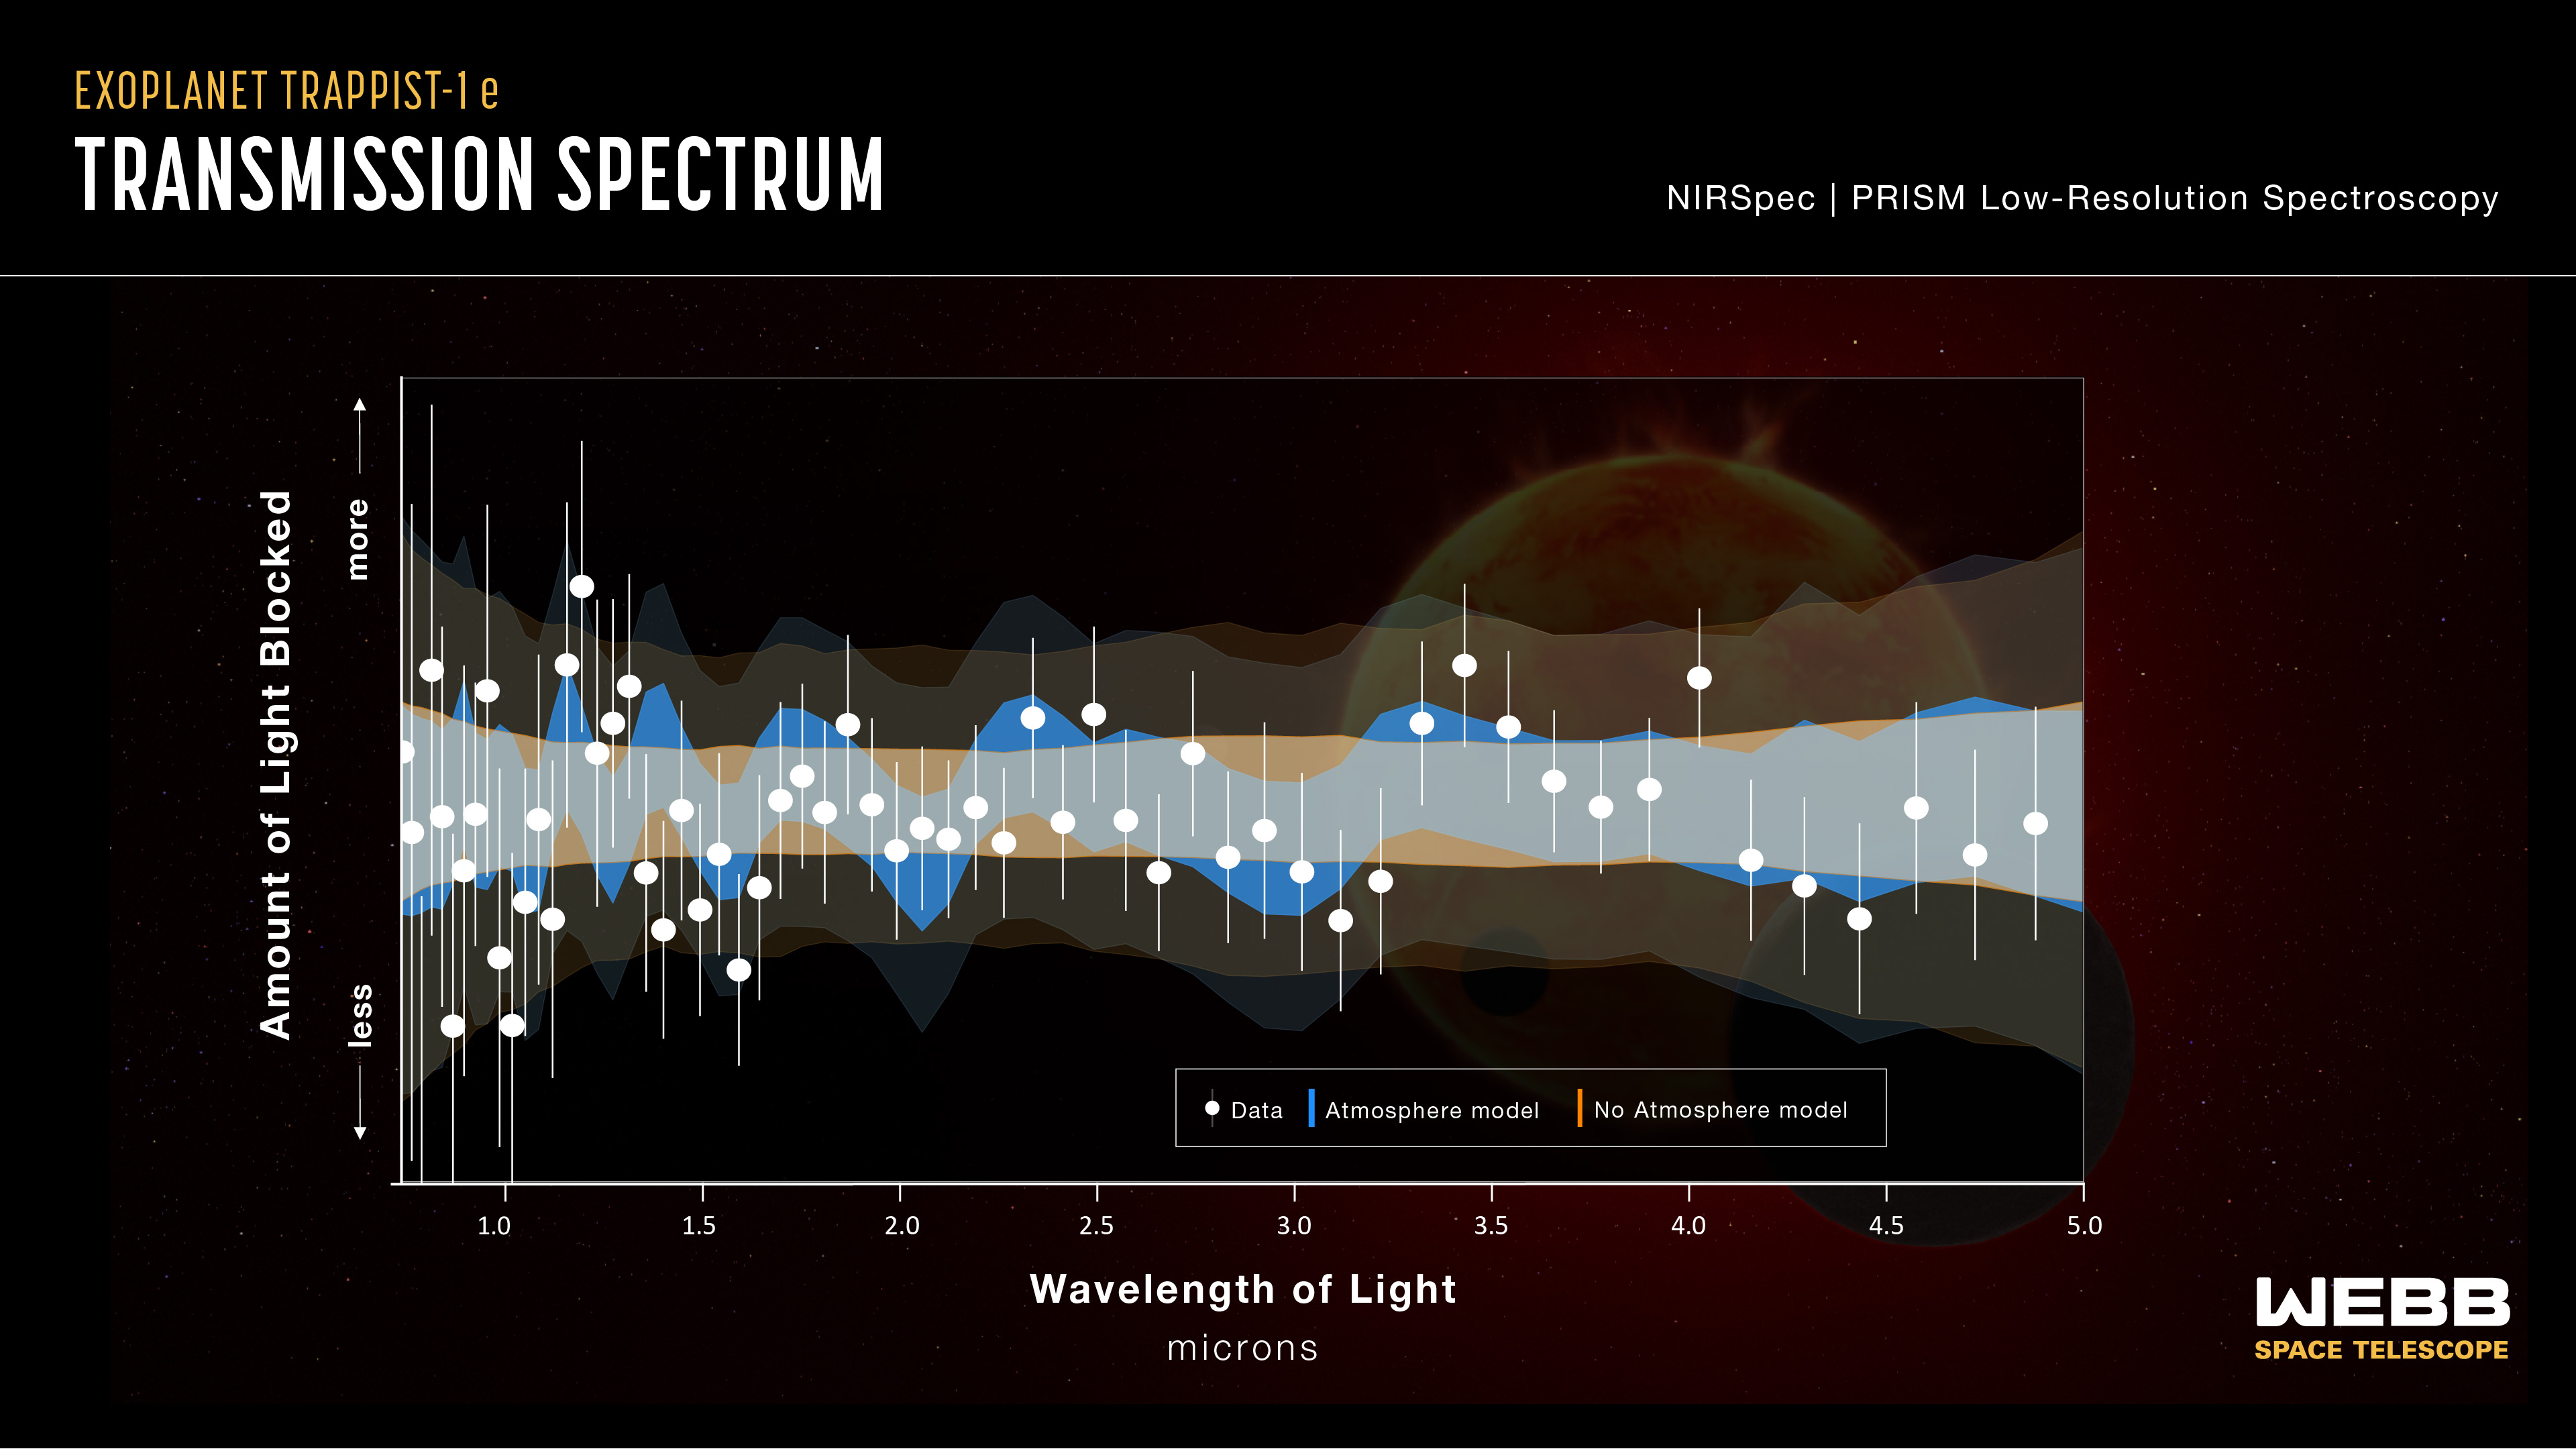

TRAPPIST-1 e Transmission Spectrum (NIRSpec)

This transmission spectrum graph compares data collected by the NIRSpec (Near-Infrared Spectrograph) instrument on the NASA/ESA/CSA James Webb Space Telescope with computer models of exoplanet TRAPPIST-1 e with (blue) and without (orange) an atmosphere. Narrower, darker colored bands show the most likely locations of data points for each model while wider, more transparent bands show areas that are less likely but still permitted by the models. The gray region shows where those two models overlap. Researchers can’t yet confidently rule out an atmosphere since many of the data points fit either scenario. As Webb makes additional observations of the exoplanet, researchers will be able to further refine and characterize the atmospheric readings. However, the existing data does indicate that the exoplanet does not have a thick, hydrogen-rich atmosphere because multiple prominent spikes would be detectable if hydrogen were present.

Credit: NASA, ESA, CSA, STScI, J. Olmsted (STScI)